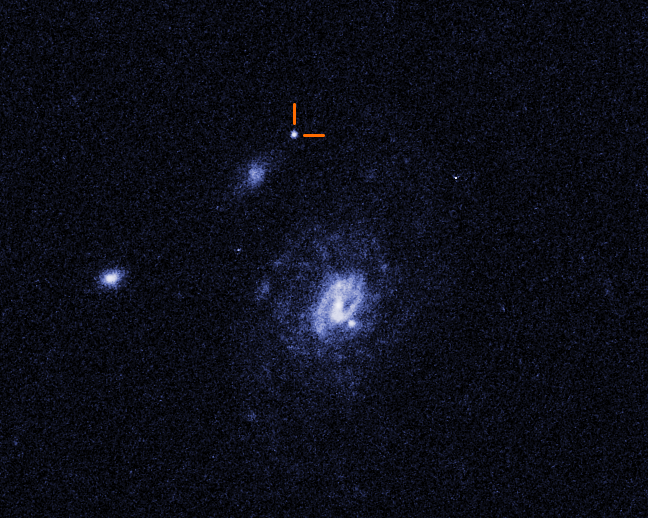

Hubble image of a Luminous Fast Blue Optical Transient (LFBOT)

A Hubble Space Telescope image of a Luminous Fast Blue Optical Transient (LFBOT) designated AT2023fhn, indicated by pointers. It shines intensely in blue light and evolves rapidly, reaching peak brightness and fading again in a matter of days, unlike supernovae which take weeks or months to dim. Only a handful of previous LFBOTs have been discovered since 2018. The surprise is that this latest transient, seen in 2023, lies at a large offset from both the barred spiral galaxy at right and the dwarf galaxy to the upper left. Only Hubble could pinpoint its location. And, the results are leaving astronomers even more confounded because all previous LFBOTs have been found in star-forming regions in the spiral arms of galaxies. It’s not clear what astronomical event would trigger such a blast far outside of a galaxy.

Credit: NASA, ESA, STScI, A. Chrimes (Radboud University)